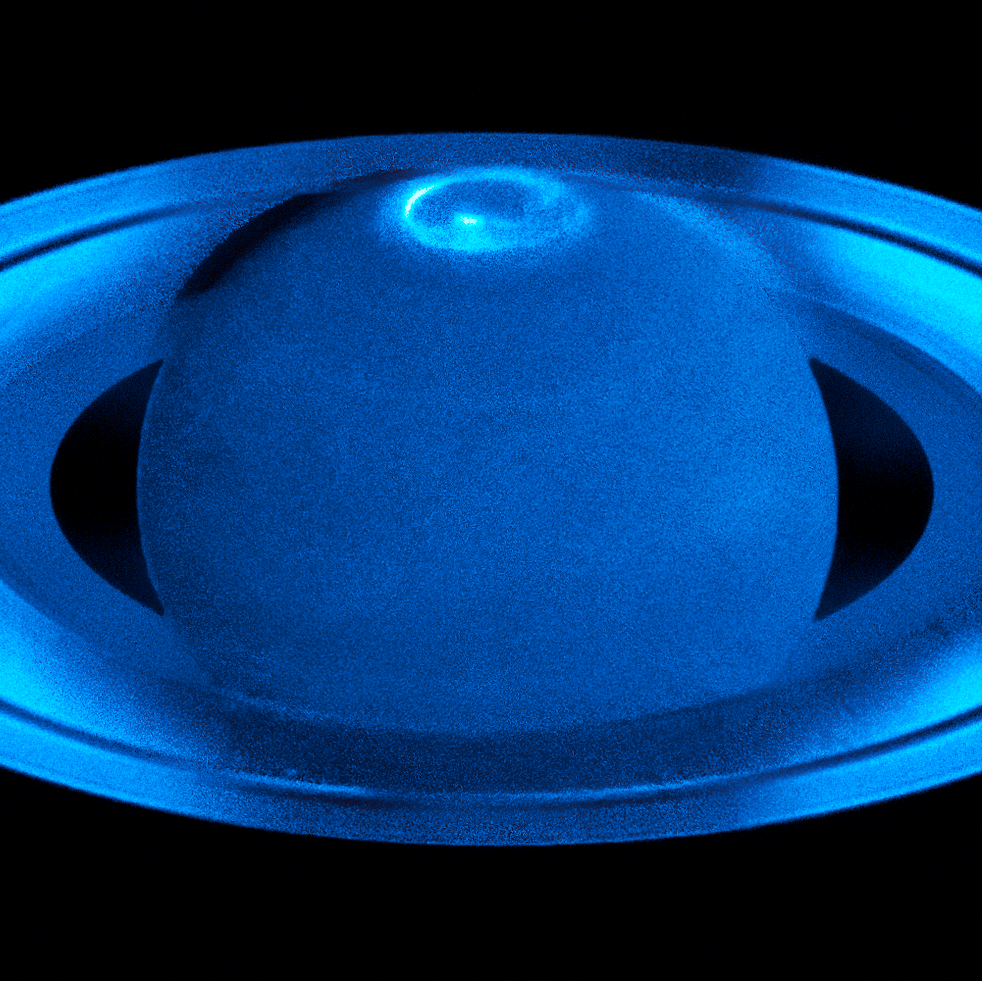

Saturn’s northern auroras

The image, observed with the Space Telescope Imaging Spectrograph in the ultraviolet, shows the auroras surrounding Saturn’s north pole region.

In comparing the different observations it became clear that Saturn’s auroras show a rich variety of emissions with highly variable localised features. The variability of the auroras is influenced by both the solar wind and the rapid rotation of Saturn.

Credit: ESA/Hubble, NASA & L. Lamy (Observatoire de Paris)